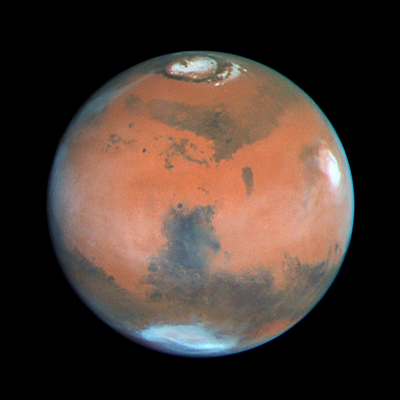

Four Views of Mars in Northern Summer

The dark Syrtis Major region dominates this image. Syrtis Major is one of the most prominent dark features on Mars, and has been visible since ground-based observers first peered at Mars through telescopes.

The bright cloud at 3 o'clock is associated with Elysium Mons. The bright bluish-white feature near the southern limb of the planet is Hellas, a 1, 200 mile (2, 000 km)diameter impact basin formed by the collision of a large body with Mars long ago. Hellas is covered with dry ice frost and clouds during this season (winter in the south).

Credit: Phil James (Univ. Toledo), Todd Clancy (Space Science Inst., Boulder, CO), Steve Lee (Univ. Colorado), and NASA/ESA